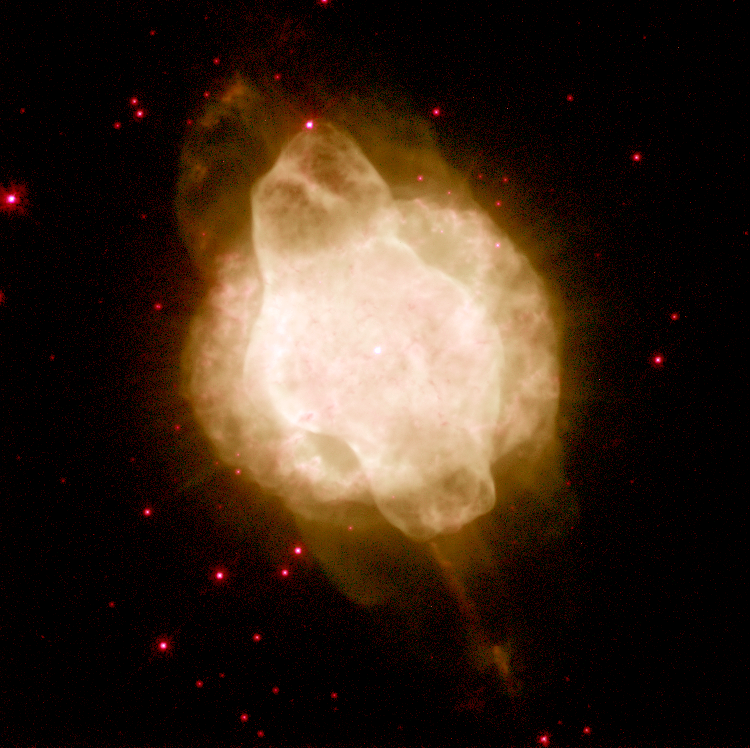

Planetary Nebula NGC 3918

Studying images of proto-planetary nebulae is important to understanding the process of star death. A star begins to die when it has exhausted its thermonuclear fuel - hydrogen and helium. The star then becomes bright and cool (red giant phase) and swells to several tens of times its normal size. It begins puffing thin shells of gas off into space. These shells become the star's cocoon. In the Hubble images, the shells are the concentric rings seen around each nebula.

Credit: Robert Rubin (NASA/ESA Ames Research Center), Reginald Dufour and Matt Browning (Rice University), Patrick Harrington (University of Maryland), and NASA/ESA